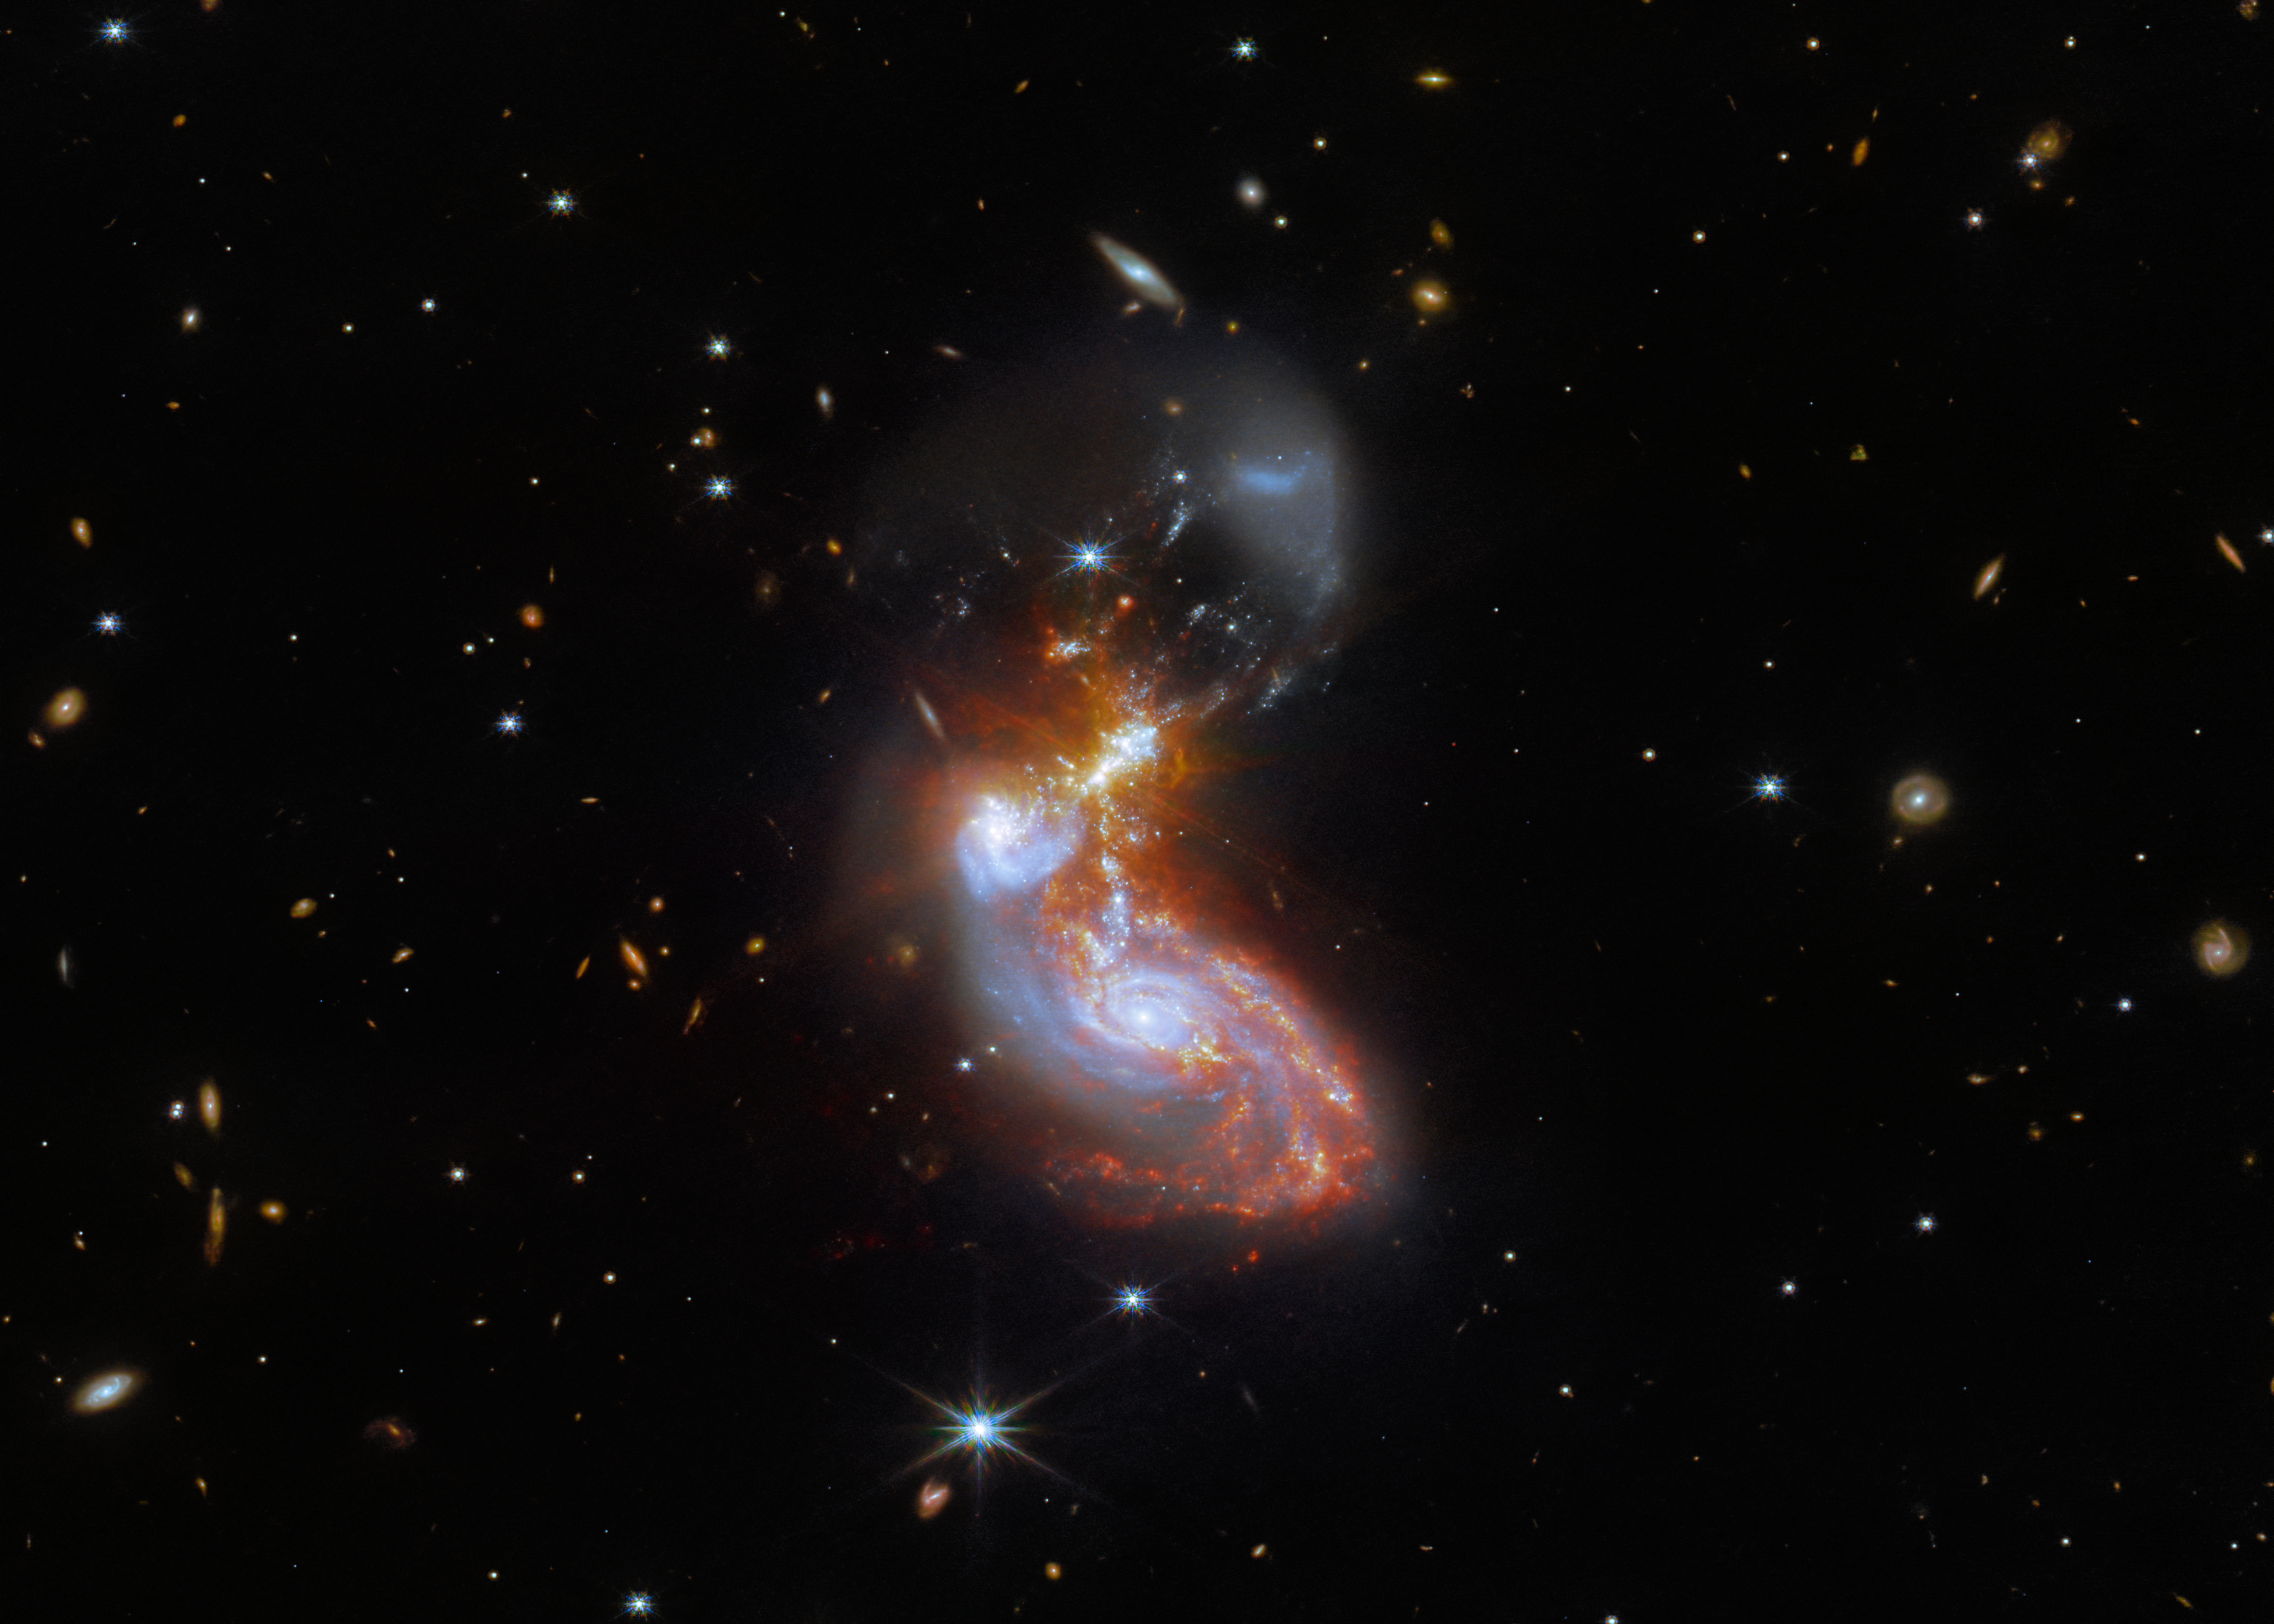

Galactic Get-Together

A merging galaxy pair cavort in this image captured by the NASA/ESA/CSA James Webb Space Telescope. This pair of galaxies, known to astronomers as II ZW 96, is roughly 500 million light-years from Earth and lies in the constellation Delphinus, close to the celestial equator. As well as the wild swirl of the merging galaxies, a menagerie of background galaxies are dotted throughout the image.

The two galaxies are in the process of merging and as a result have a chaotic, disturbed shape. The bright cores of the two galaxies are connected by bright tendrils of star-forming regions, and the spiral arms of the lower galaxy have been twisted out of shape by the gravitational perturbation of the galaxy merger. It is these star-forming regions that made II ZW 96 such a tempting target for Webb; the galaxy pair is particularly bright at infrared wavelengths thanks to the presence of the star formation.

This observation is from a collection of Webb measurements delving into the details of galactic evolution, in particular in nearby Luminous Infrared Galaxies such as II ZW 96. These galaxies, as the name suggests, are particularly bright at infrared wavelengths, with luminosities more than 100 billion times that of the Sun. An international team of astronomers proposed a study of complex galactic ecosystems — including the merging galaxies in II ZW 96 — to put Webb through its paces soon after the telescope was commissioned. Their chosen targets have already been observed with ground-based telescopes and the NASA/ESA Hubble Space Telescope, which will provide astronomers with insights into Webb’s ability to unravel the details of complex galactic environments.

Webb captured this merging galaxy pair with a pair of its cutting-edge instruments; NIRCam — the Near-InfraRed Camera — and MIRI, the Mid-InfraRed Instrument. If you are interested in exploring the differences between Hubble and Webb’s observations of II ZW 96, you can do so here.

MIRI was contributed by ESA and NASA, with the instrument designed and built by a consortium of nationally funded European Institutes (The MIRI European Consortium) in partnership with JPL and the University of Arizona. The University of Arizona also provided the NIRCam instrument.

Credit: ESA/Webb, NASA & CSA, L. Armus, A. Evans